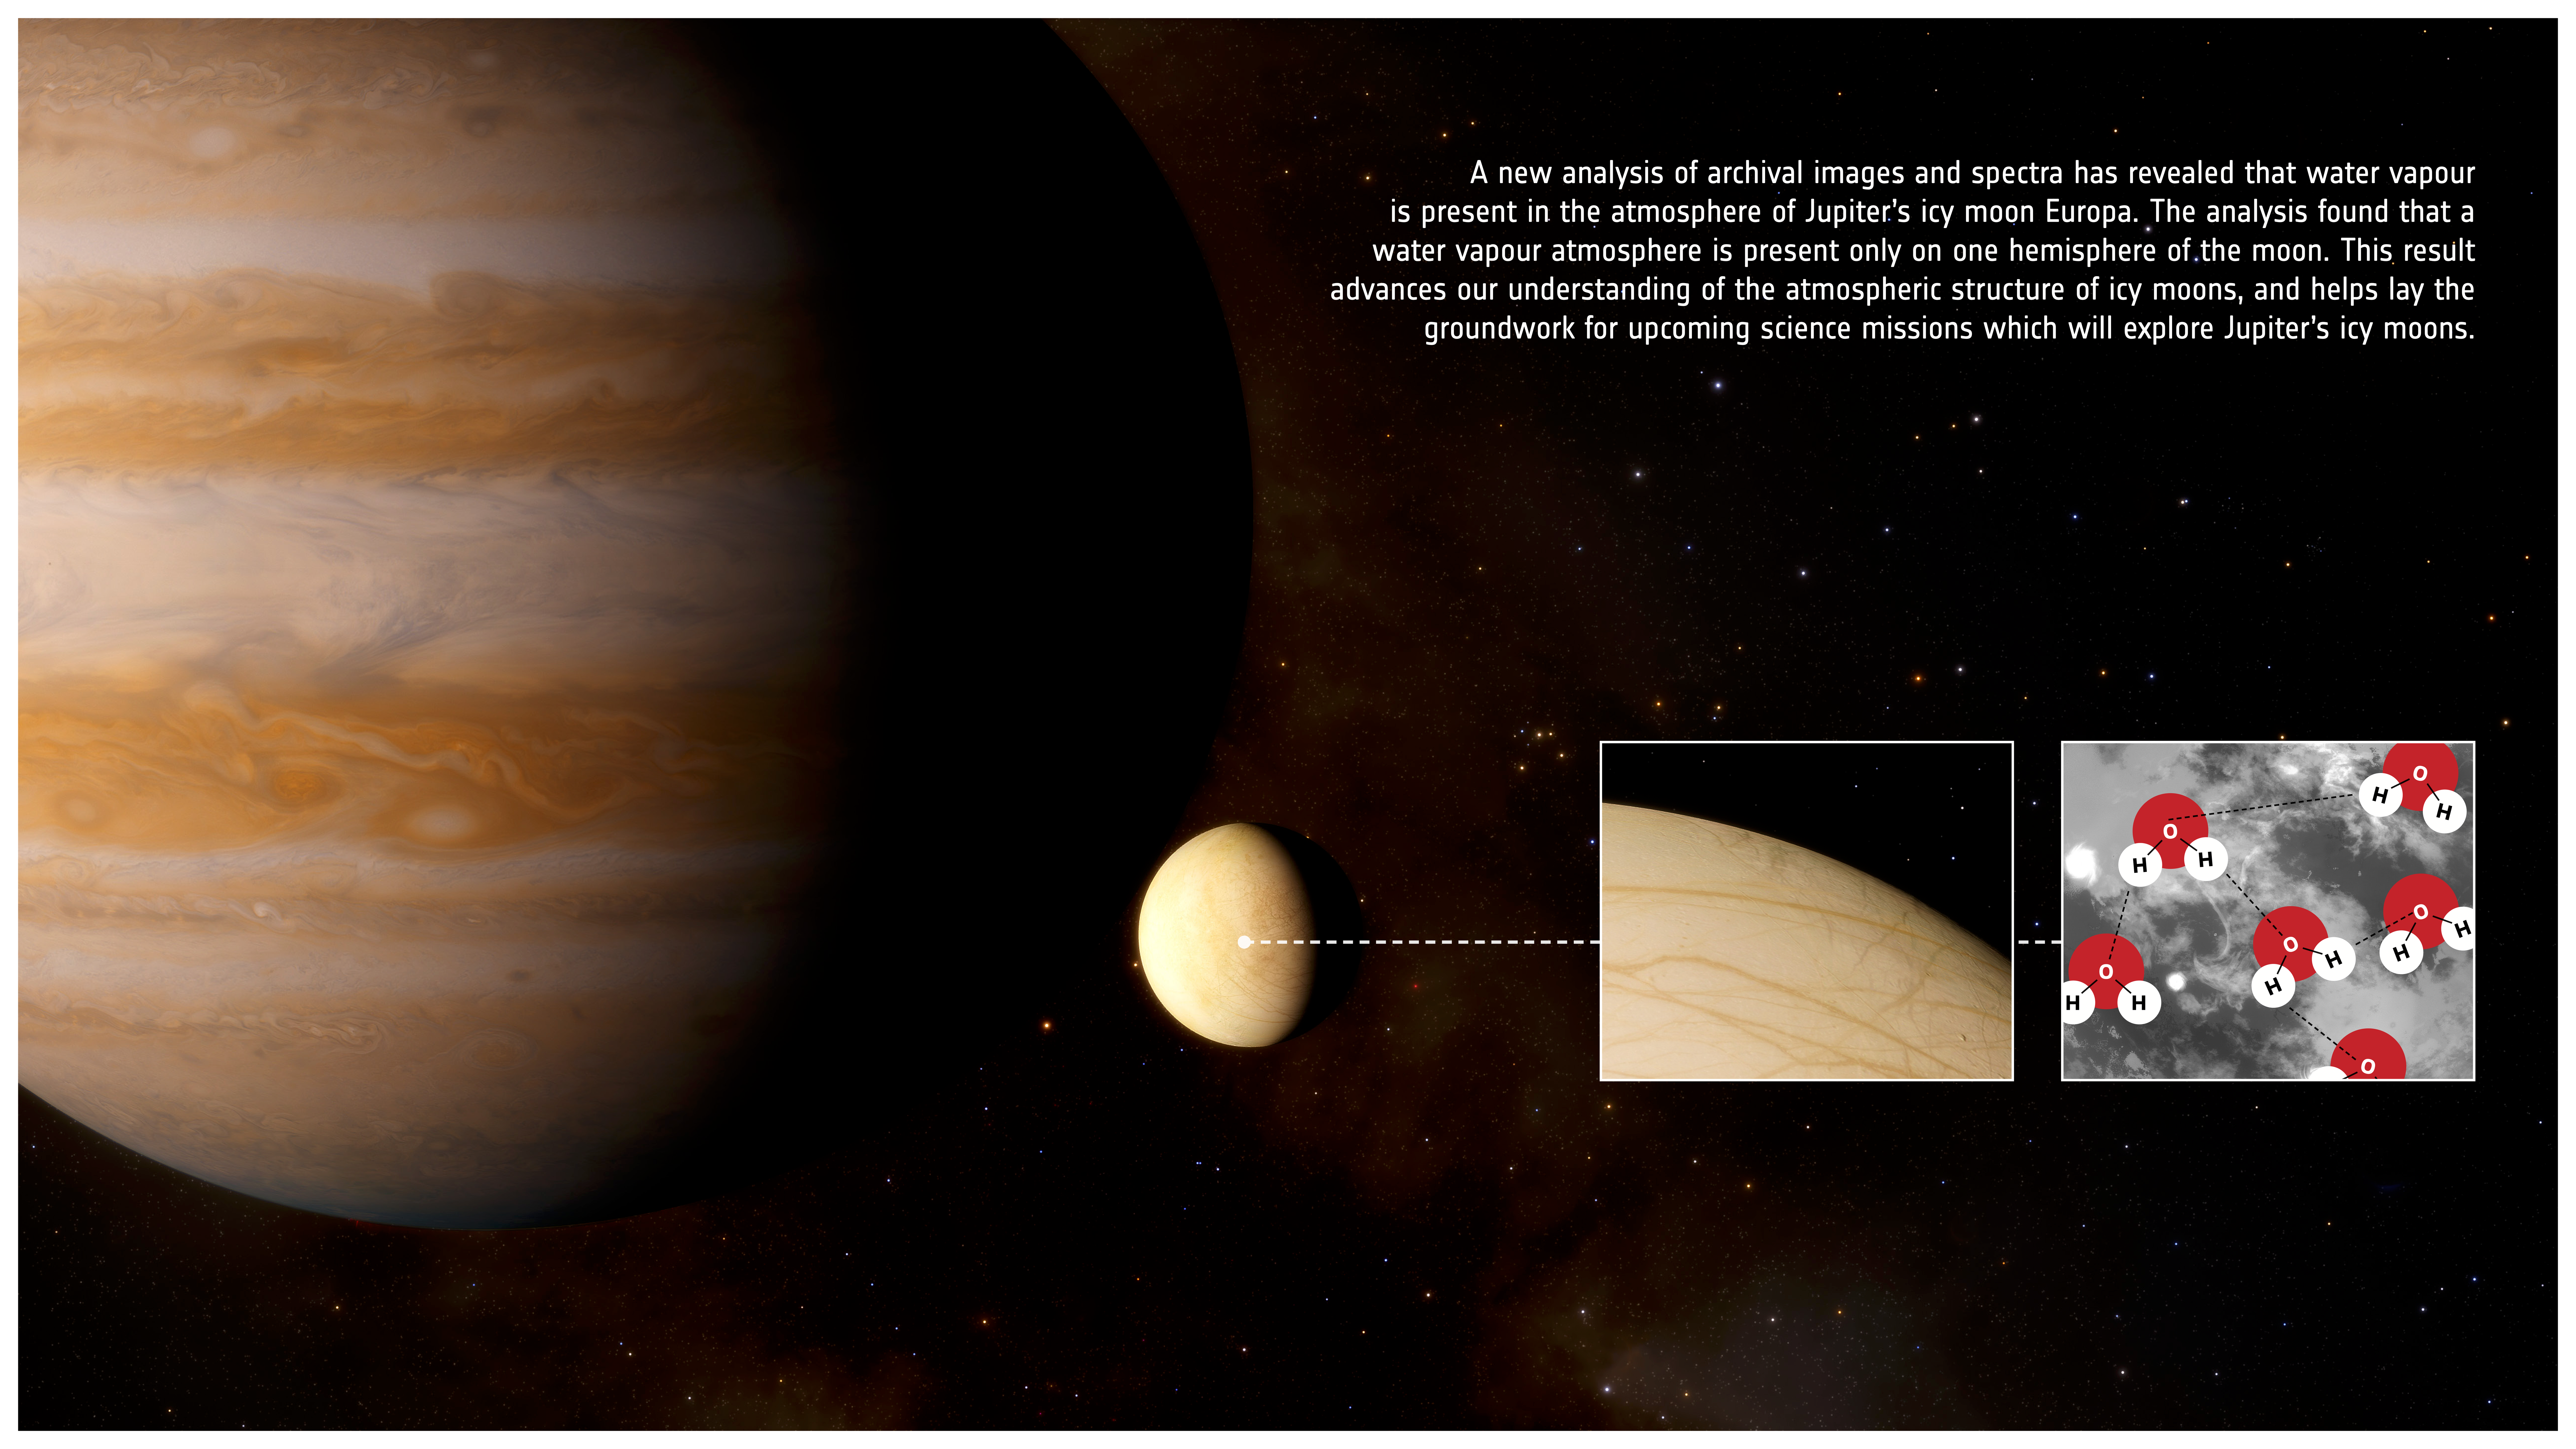

Artist’s Impression of a Water Atmosphere on Europa

This image presents an artist’s impression infographic to highlight that a new analysis of archival images and spectra has revealed that water vapour is also present in the atmosphere of Jupter’s icy moon Europa. The analysis found that a water vapour atmosphere is present only on one hemisphere of the moon. This result advances our understanding of the atmospheric structure of icy moons, and helps lay the groundwork for upcoming science missions which will explore Jupiter’s icy moons.

Credit: ESA/Hubble, J. da Silva